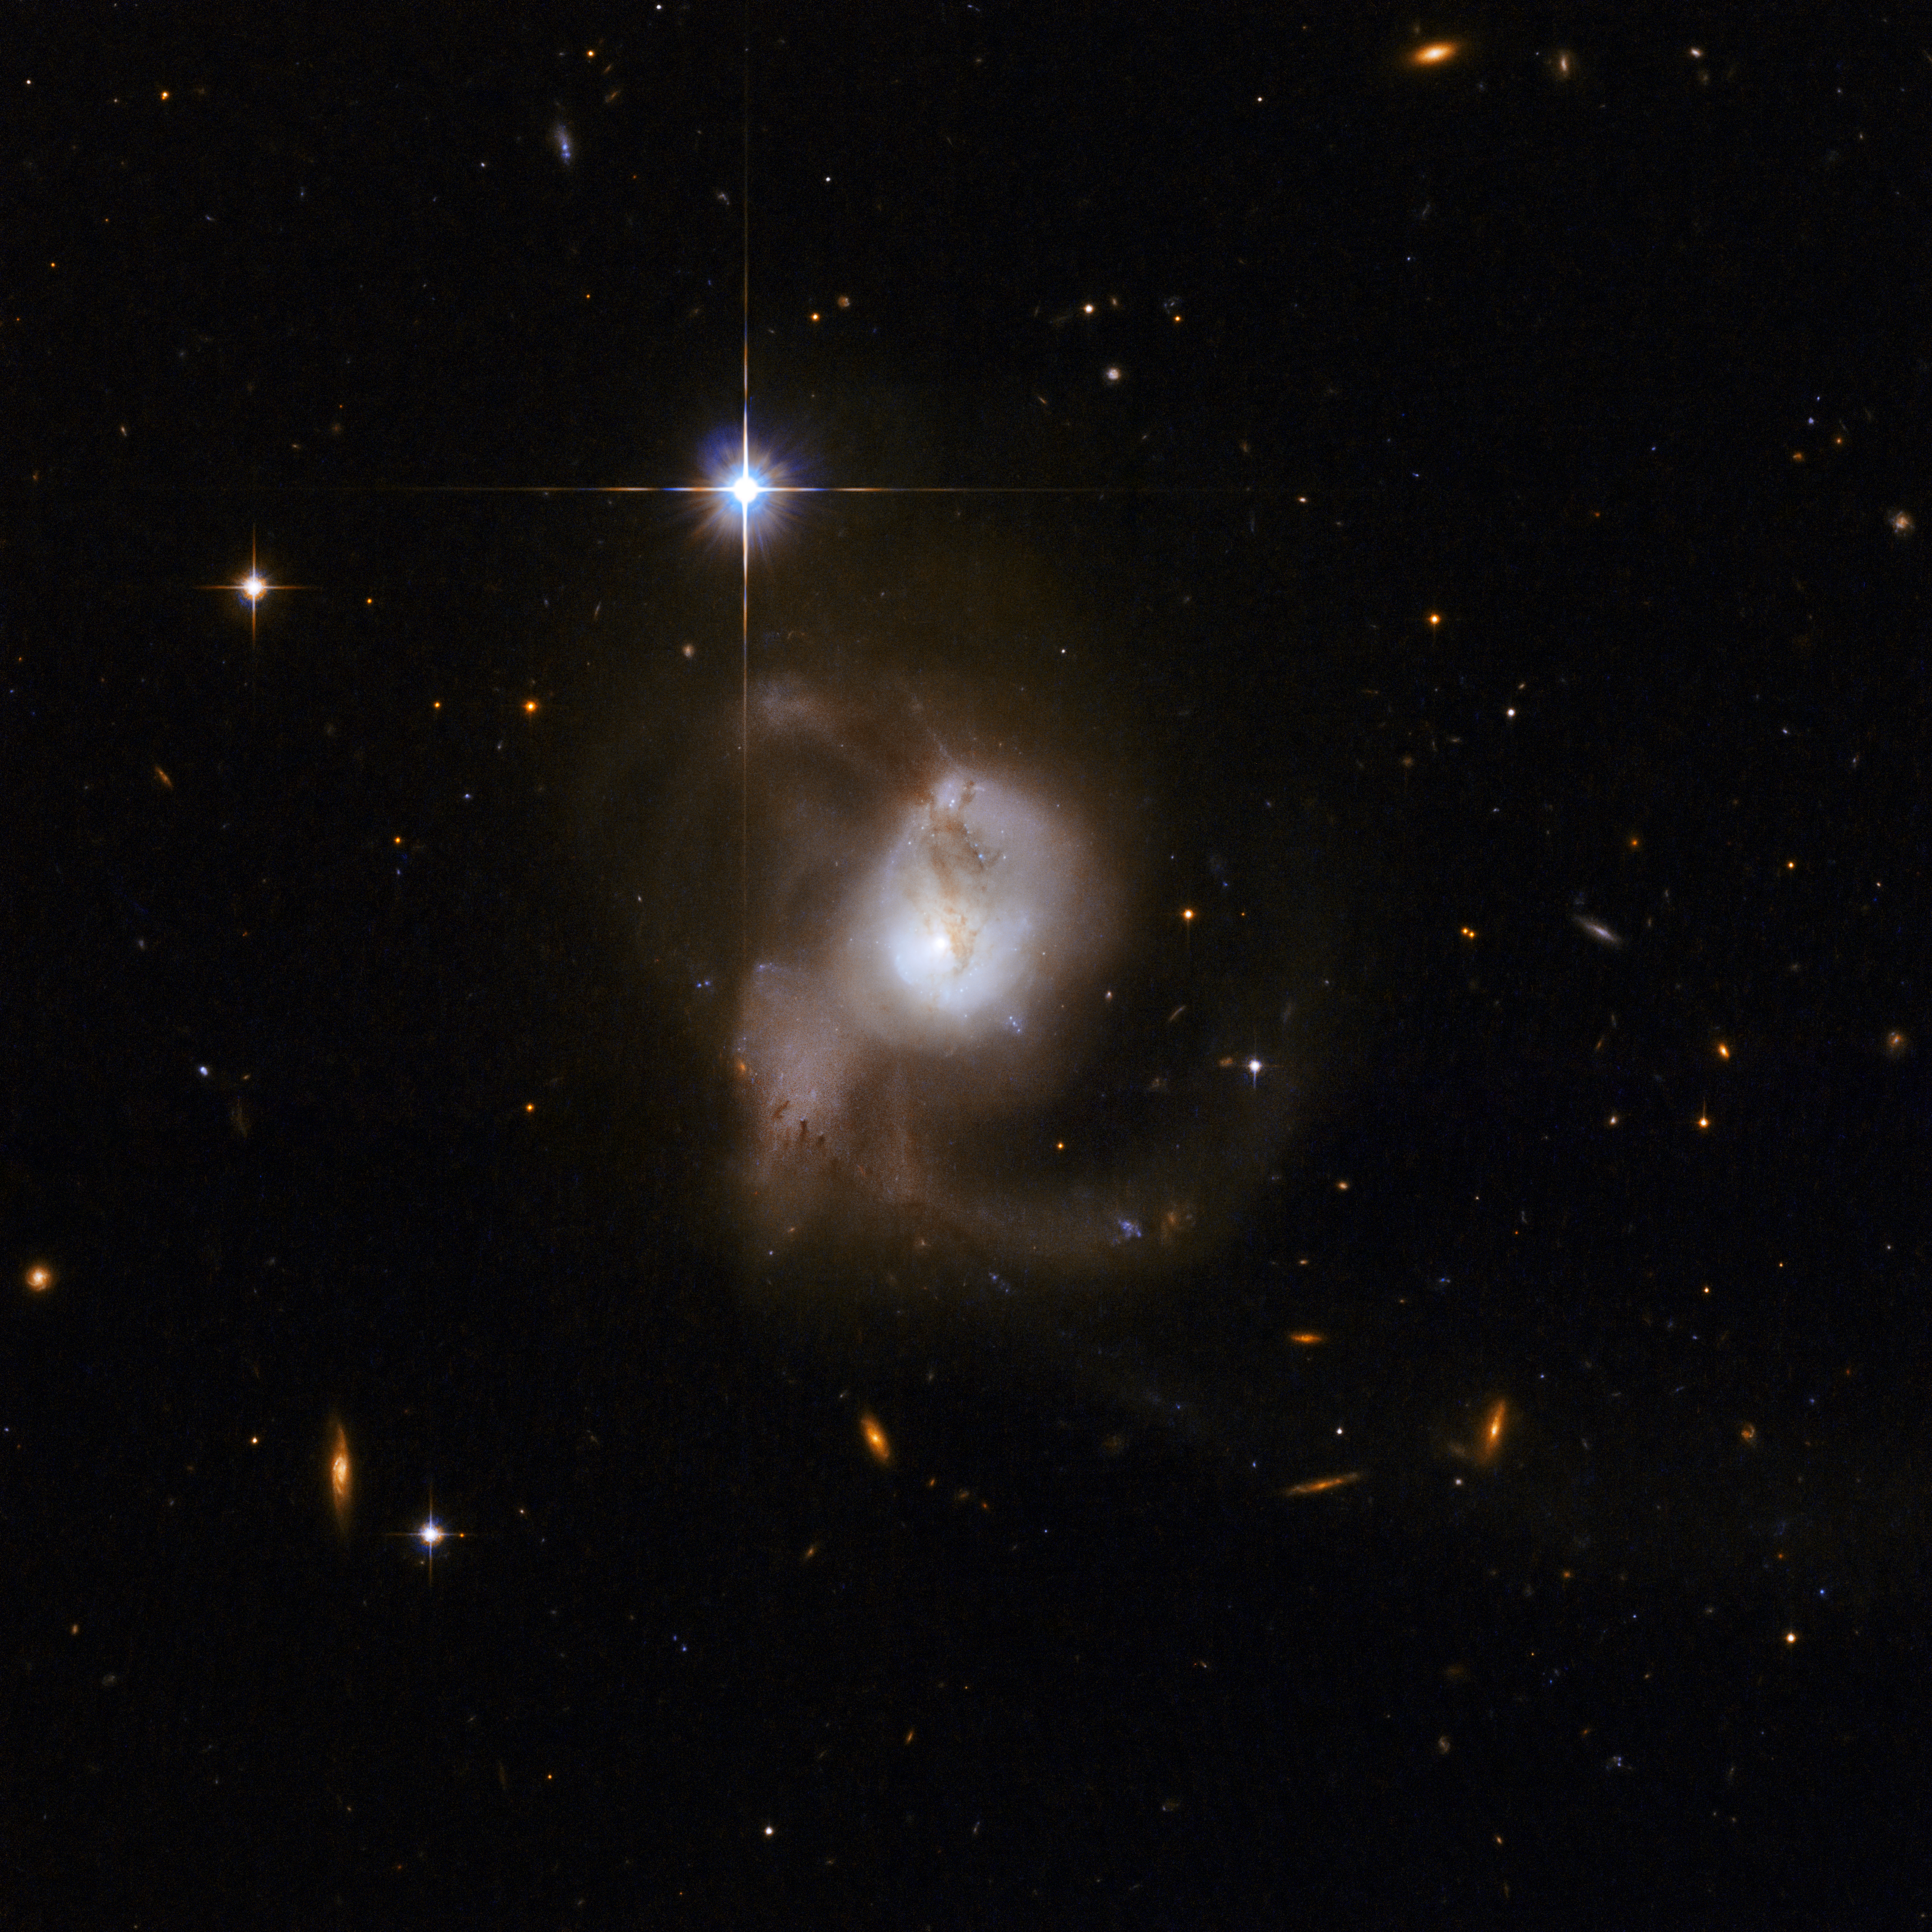

ESO 239-IG002

ESO239 is most likely the result of a cosmic collision or a lengthy merger process that will eventually result in an elliptical galaxy. The messy intermediate stage, captured here, is a galaxy with long, tangled tidal tails that envelope the galaxy's core.

This image is part of a large collection of 59 images of merging galaxies taken by the Hubble Space Telescope and released on the occasion of its 18th anniversary on 24th April 2008.

Credit: NASA, ESA, the Hubble Heritage Team (STScI/AURA)-ESA/Hubble Collaboration and A. Evans (University of Virginia, Charlottesville/NRAO/Stony Brook University)